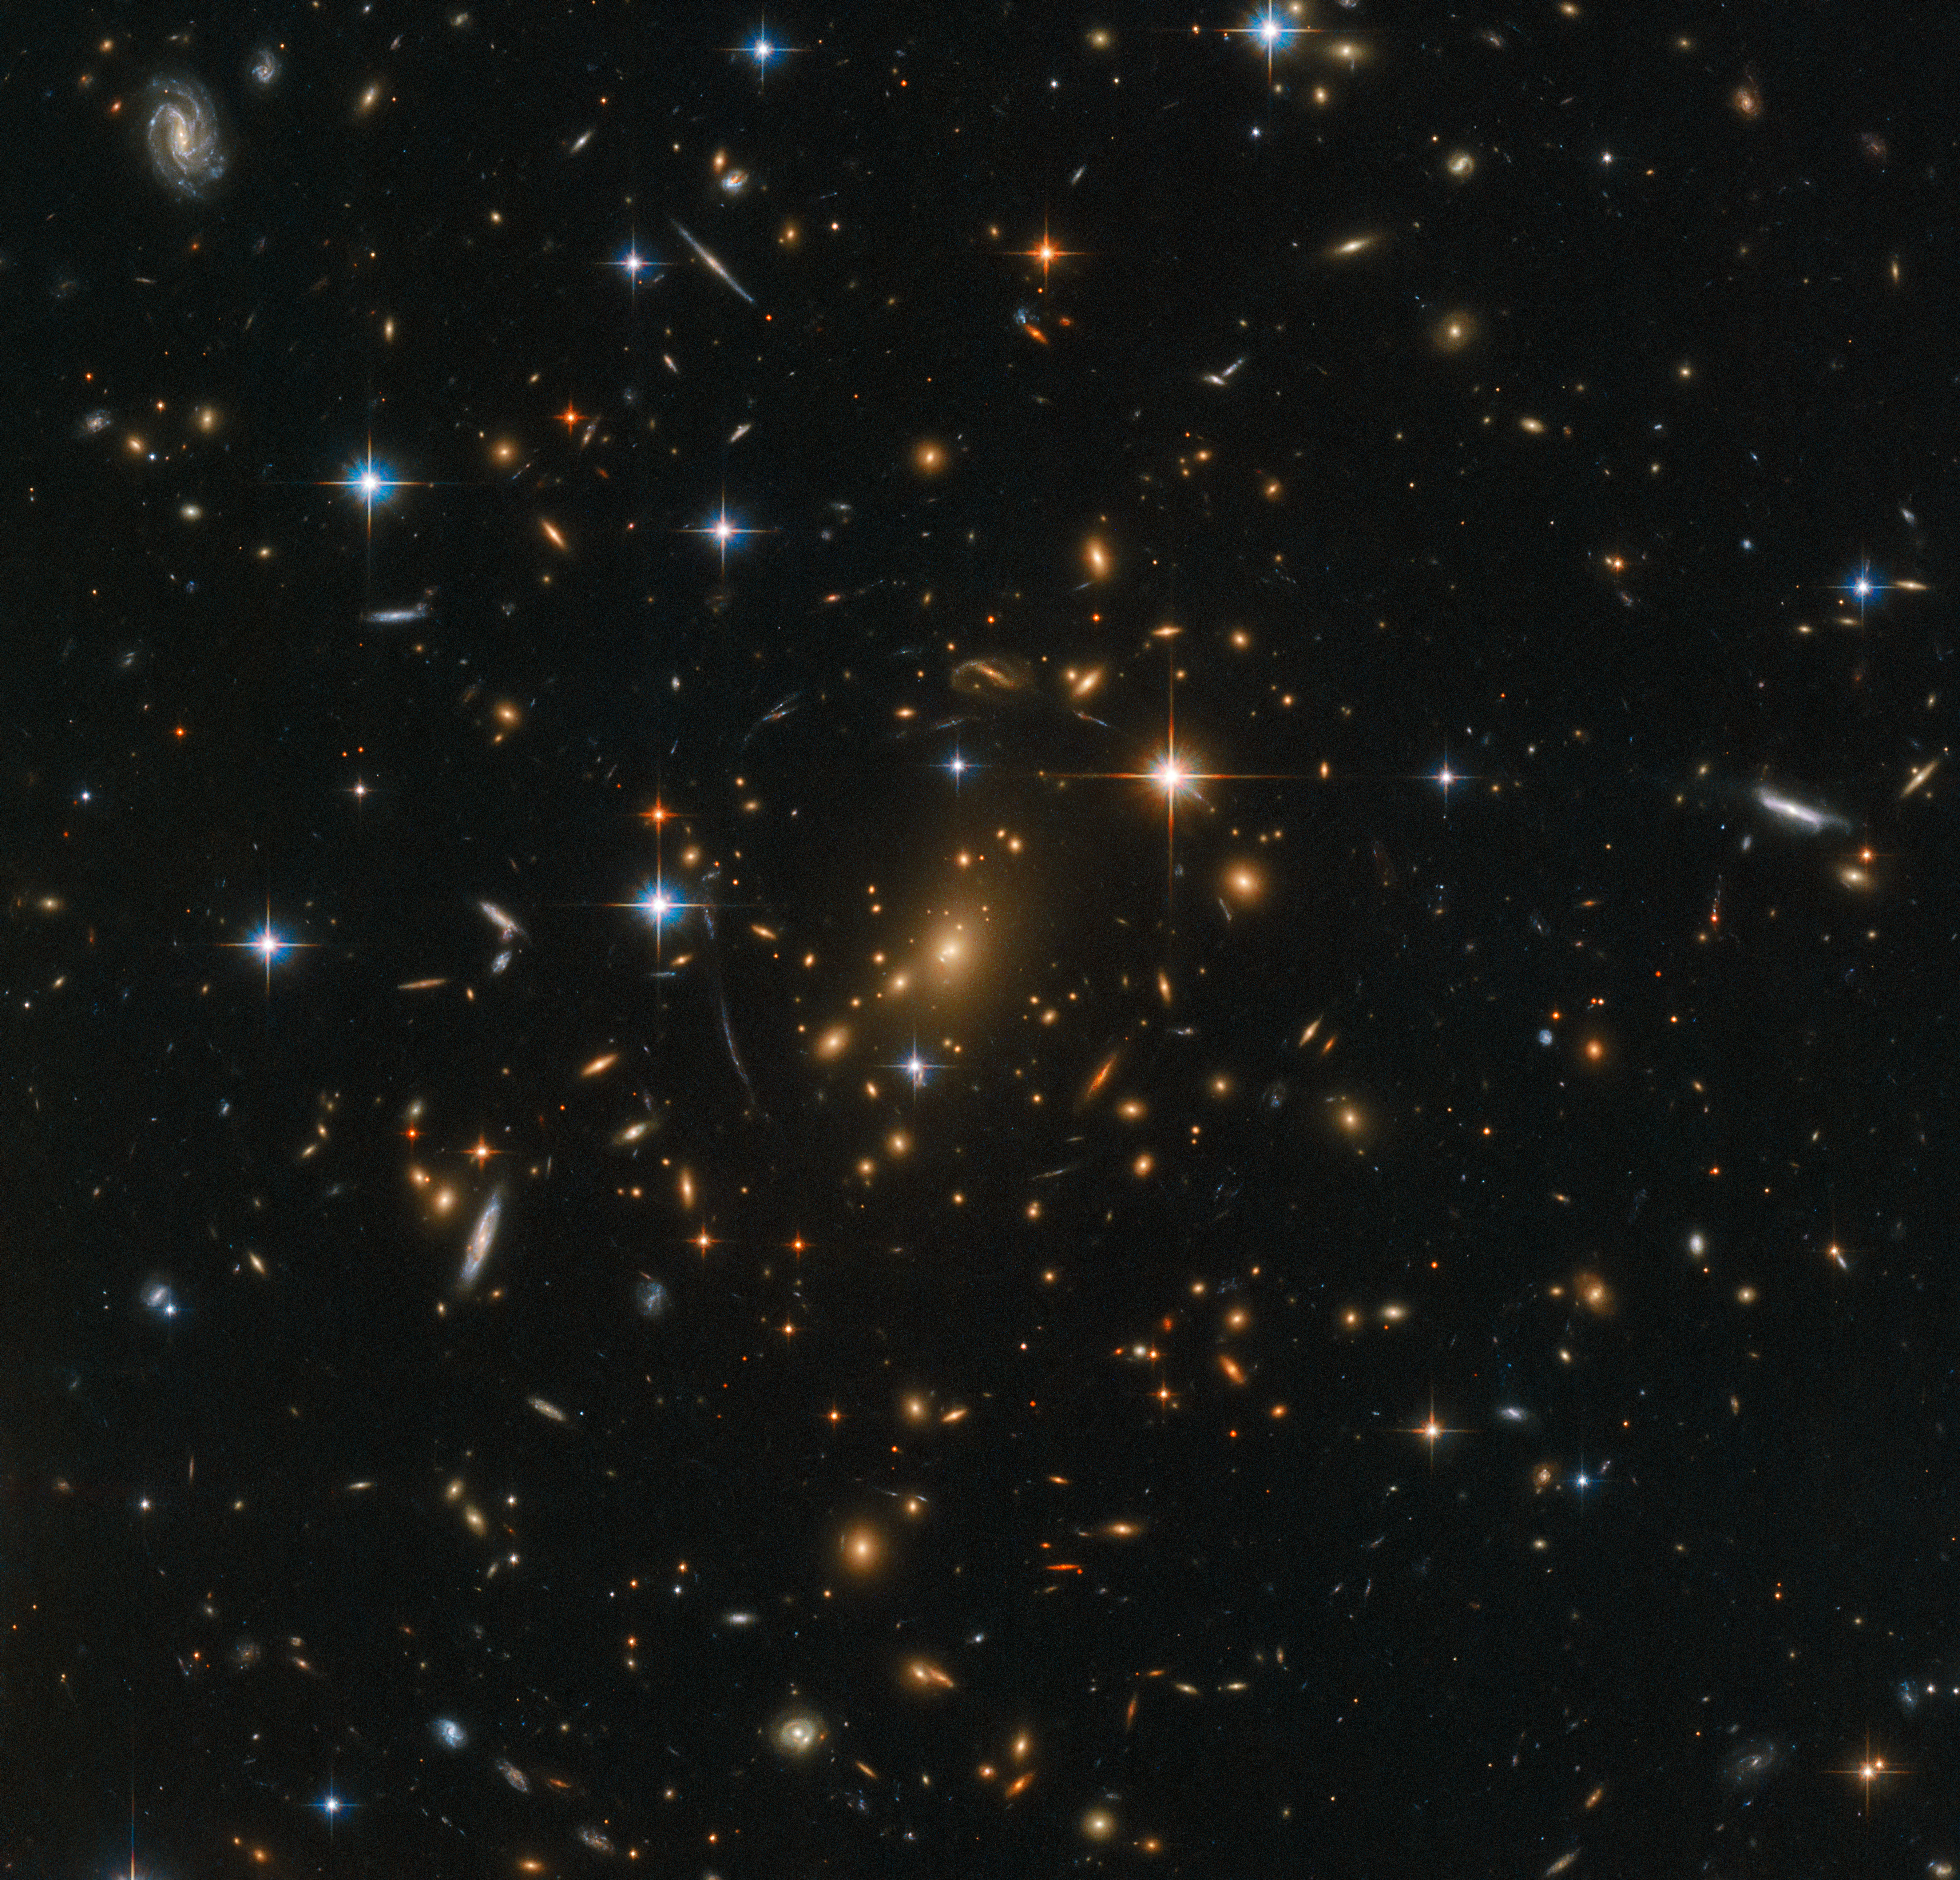

Galactic treasure chest

Galaxies abound in this spectacular Hubble image; spiral arms swirl in all colours and orientations, and fuzzy ellipticals can be seen speckled across the frame as softly glowing smudges on the sky. Each visible speck of a galaxy is home to countless stars. A few stars closer to home shine brightly in the foreground, while a massive galaxy cluster nestles at the very centre of the image; an immense collection of maybe thousands of galaxies, all held together by the relentless force of gravity.

Galaxy clusters are some of the most interesting objects in the cosmos. They are the nodes of the cosmic web that permeates the entire Universe — to study them is to study the organisation of matter on the grandest of scales. Not only are galaxy clusters ideal subjects for the study of dark matter and dark energy, but they also allow the study of farther-flung galaxies. Their immense gravitational influence means they distort the spacetime around them, causing them to act like giant zoom lenses. The light of background galaxies is warped and magnified as it passes through the galaxy cluster, allowing astronomers insight into the distant — and therefore early — Universe.

This image was taken by Hubble’s Advanced Camera for Surveys and Wide-Field Camera 3 as part of an observing programme called RELICS (Reionization Lensing Cluster Survey). RELICS imaged 41 massive galaxy clusters with the aim of finding the brightest distant galaxies for the forthcoming NASA/ESA/CSA James Webb Space Telescope (JWST) to study.

Credit: ESA/Hubble & NASA, RELICS